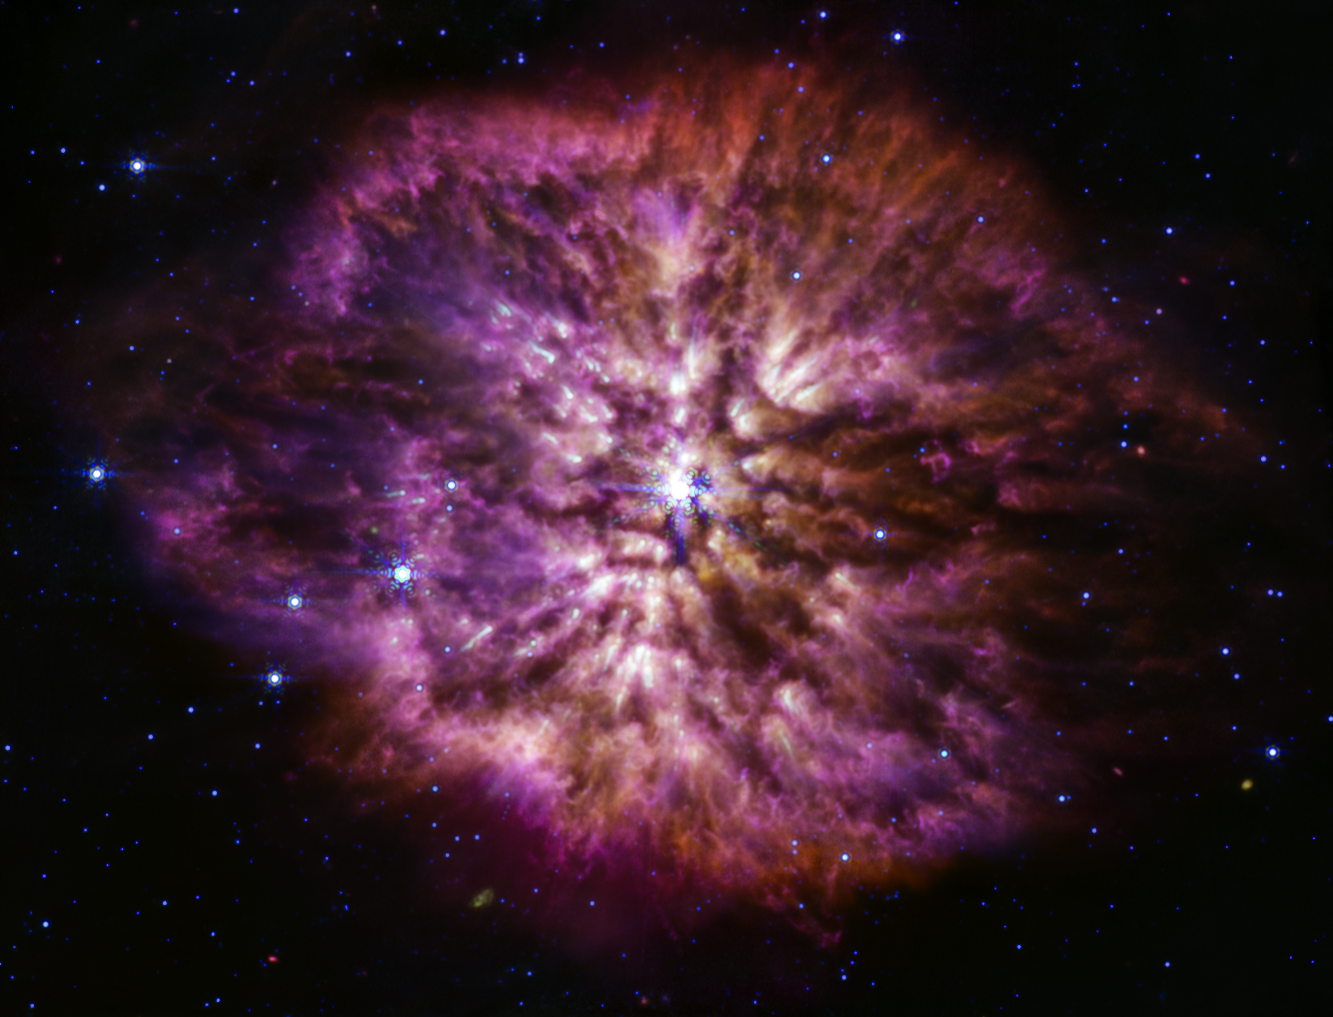

Wolf-Rayet 124 (MIRI image)

Wolf-Rayet stars are known to be efficient dust producers, and the Mid-Infrared Instrument (MIRI) on the NASA/ESA/CSA James Webb Space Telescope shows this to great effect. Cooler cosmic dust glows at the longer mid-infrared wavelengths, displaying the structure of WR 124’s nebula. The 10 light-years-wide nebula is made of material cast off from the ageing star in random ejections, and from dust produced in the ensuing turbulence. This brilliant stage of mass loss precedes the star’s eventual supernova, when nuclear fusion in its core stops and the pressure of gravity causes it to collapse in on itself, and then explode. As MIRI demonstrates here, Webb will help astronomers to explore questions that were previously only available to theory, questions like how much dust stars like this create before exploding in a supernova, and how much of that dust is large enough to survive the blast and go on to serve as a building block of future stars and planets.

In this image red is assigned to wavelengths of 12.8 and 18 microns (F1280W, F1800W), green to 11.3 microns (F1130W), and blue to 7.7 microns (F770W).

Credit: NASA, ESA, CSA, STScI, Webb ERO Production Team